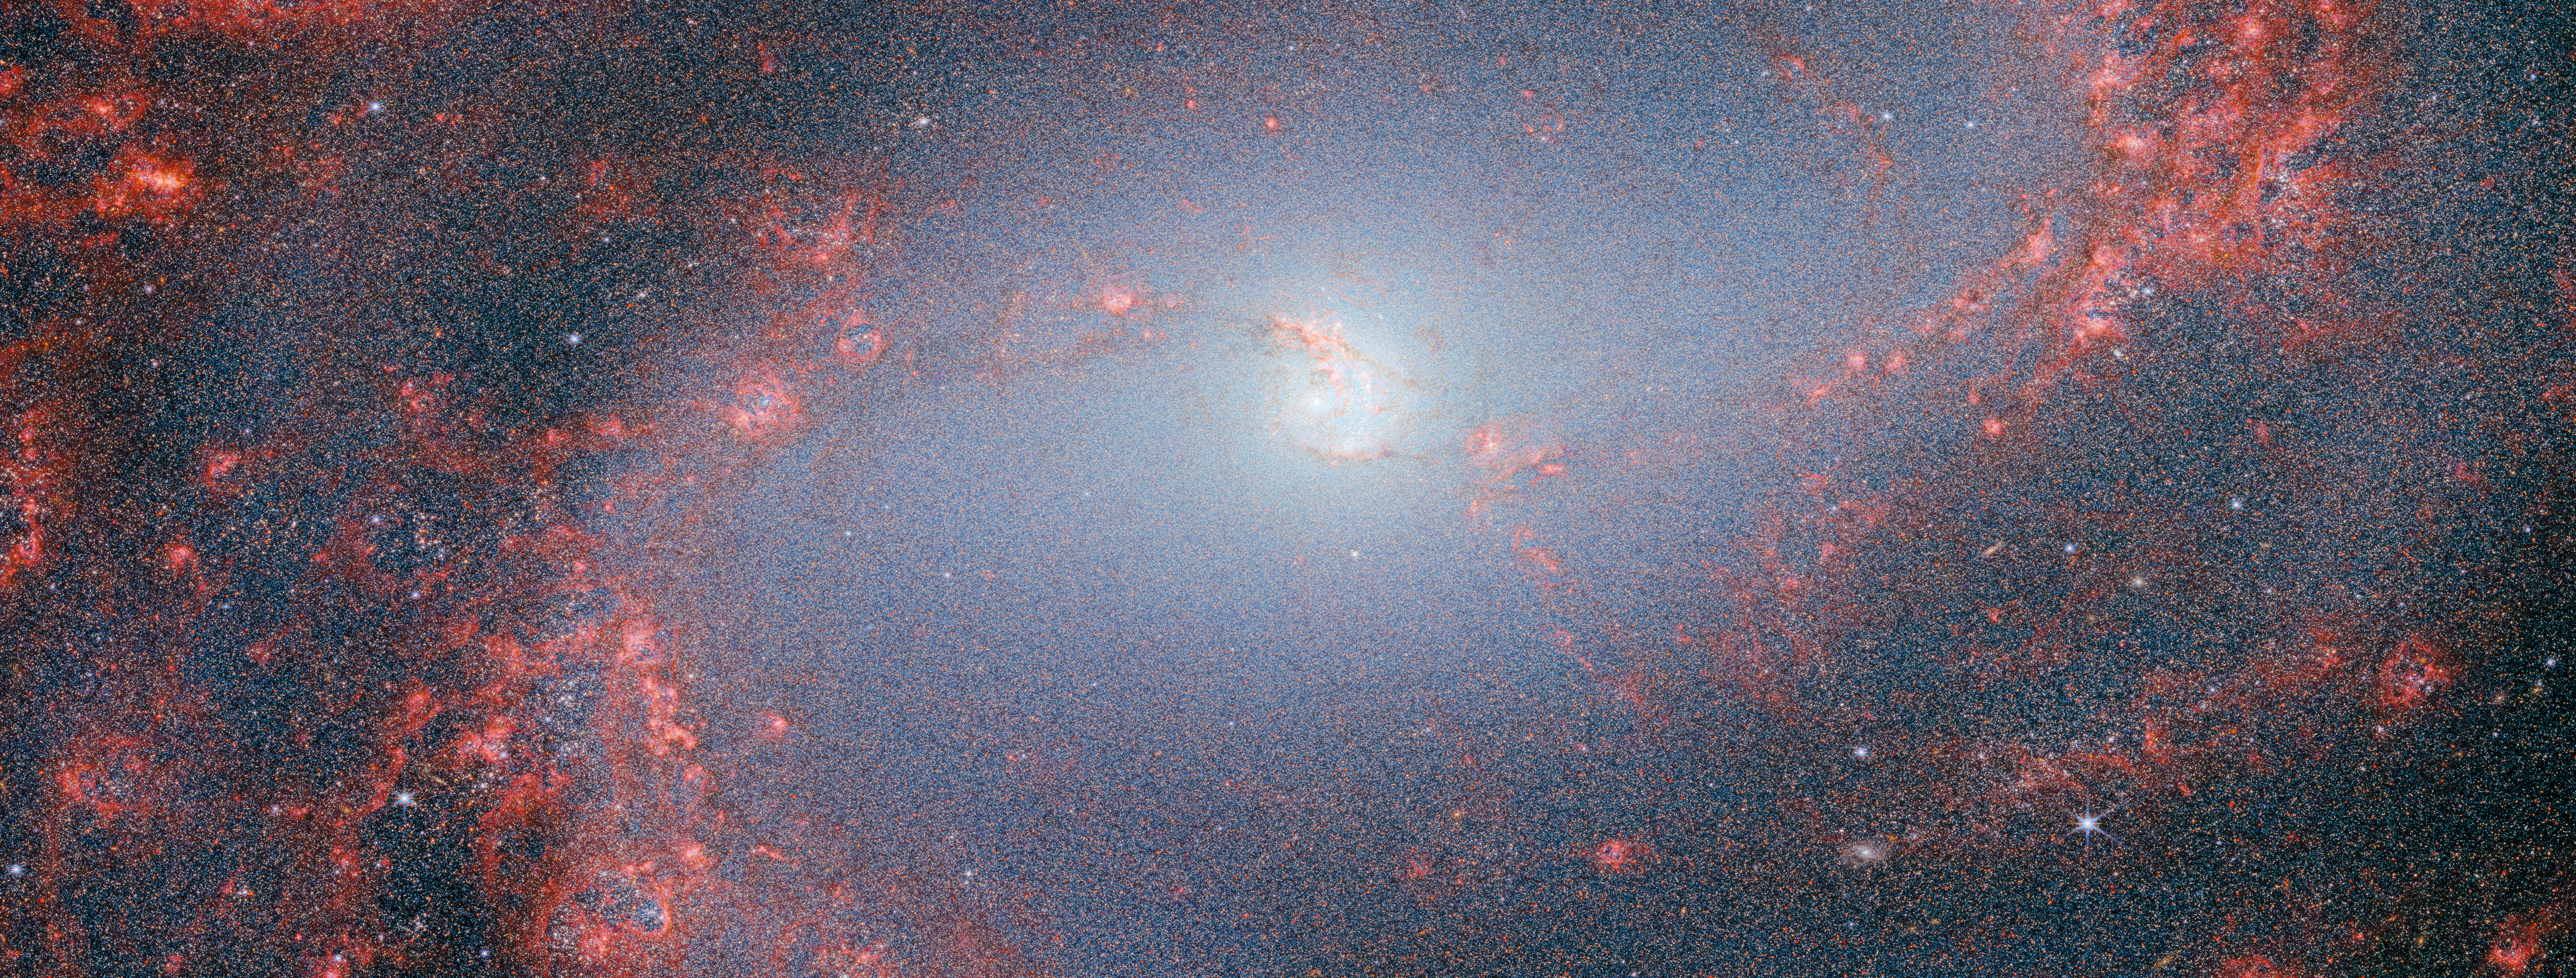

No tricks, just treats (M83 NIRCam image)

This image, which truly is a visual treat, was captured by Webb’s NIRCam, or Near-InfraRed Camera. NIRCam makes observations in the near-infrared, which spans wavelengths of light that are just longer than optical wavelengths. Like MIRI, it is equipped with a range of filters that cover its wavelength range of 0.6 to 5 micrometres, including 29 filters specifically intended for imaging. Data collected through eight of those filters were used to complete this impressive image, which picks out light emitted from the wealth of stars that might be obscured by dust at other wavelengths. Even though stars do not emit the majority of their light in the infrared, optical light is much more vulnerable to being scattered by dust than infrared light is, and so infrared instruments like Webb can provide the best opportunities to study stars in regions (like galaxies) that might also contain large amounts of dust.

In this image, the bright red-pink spots correspond to regions rich in ionised hydrogen, which is due to the presence of newly formed stars. The diffuse gradient of blue light around the central region shows the distribution of older stars. The compact light blue regions within the red, ionised gas, mostly concentrated in the spiral arms, show the distribution of young star clusters.

Credit: ESA/Webb, NASA & CSA, A. Adamo (Stockholm University) and the FEAST JWST team